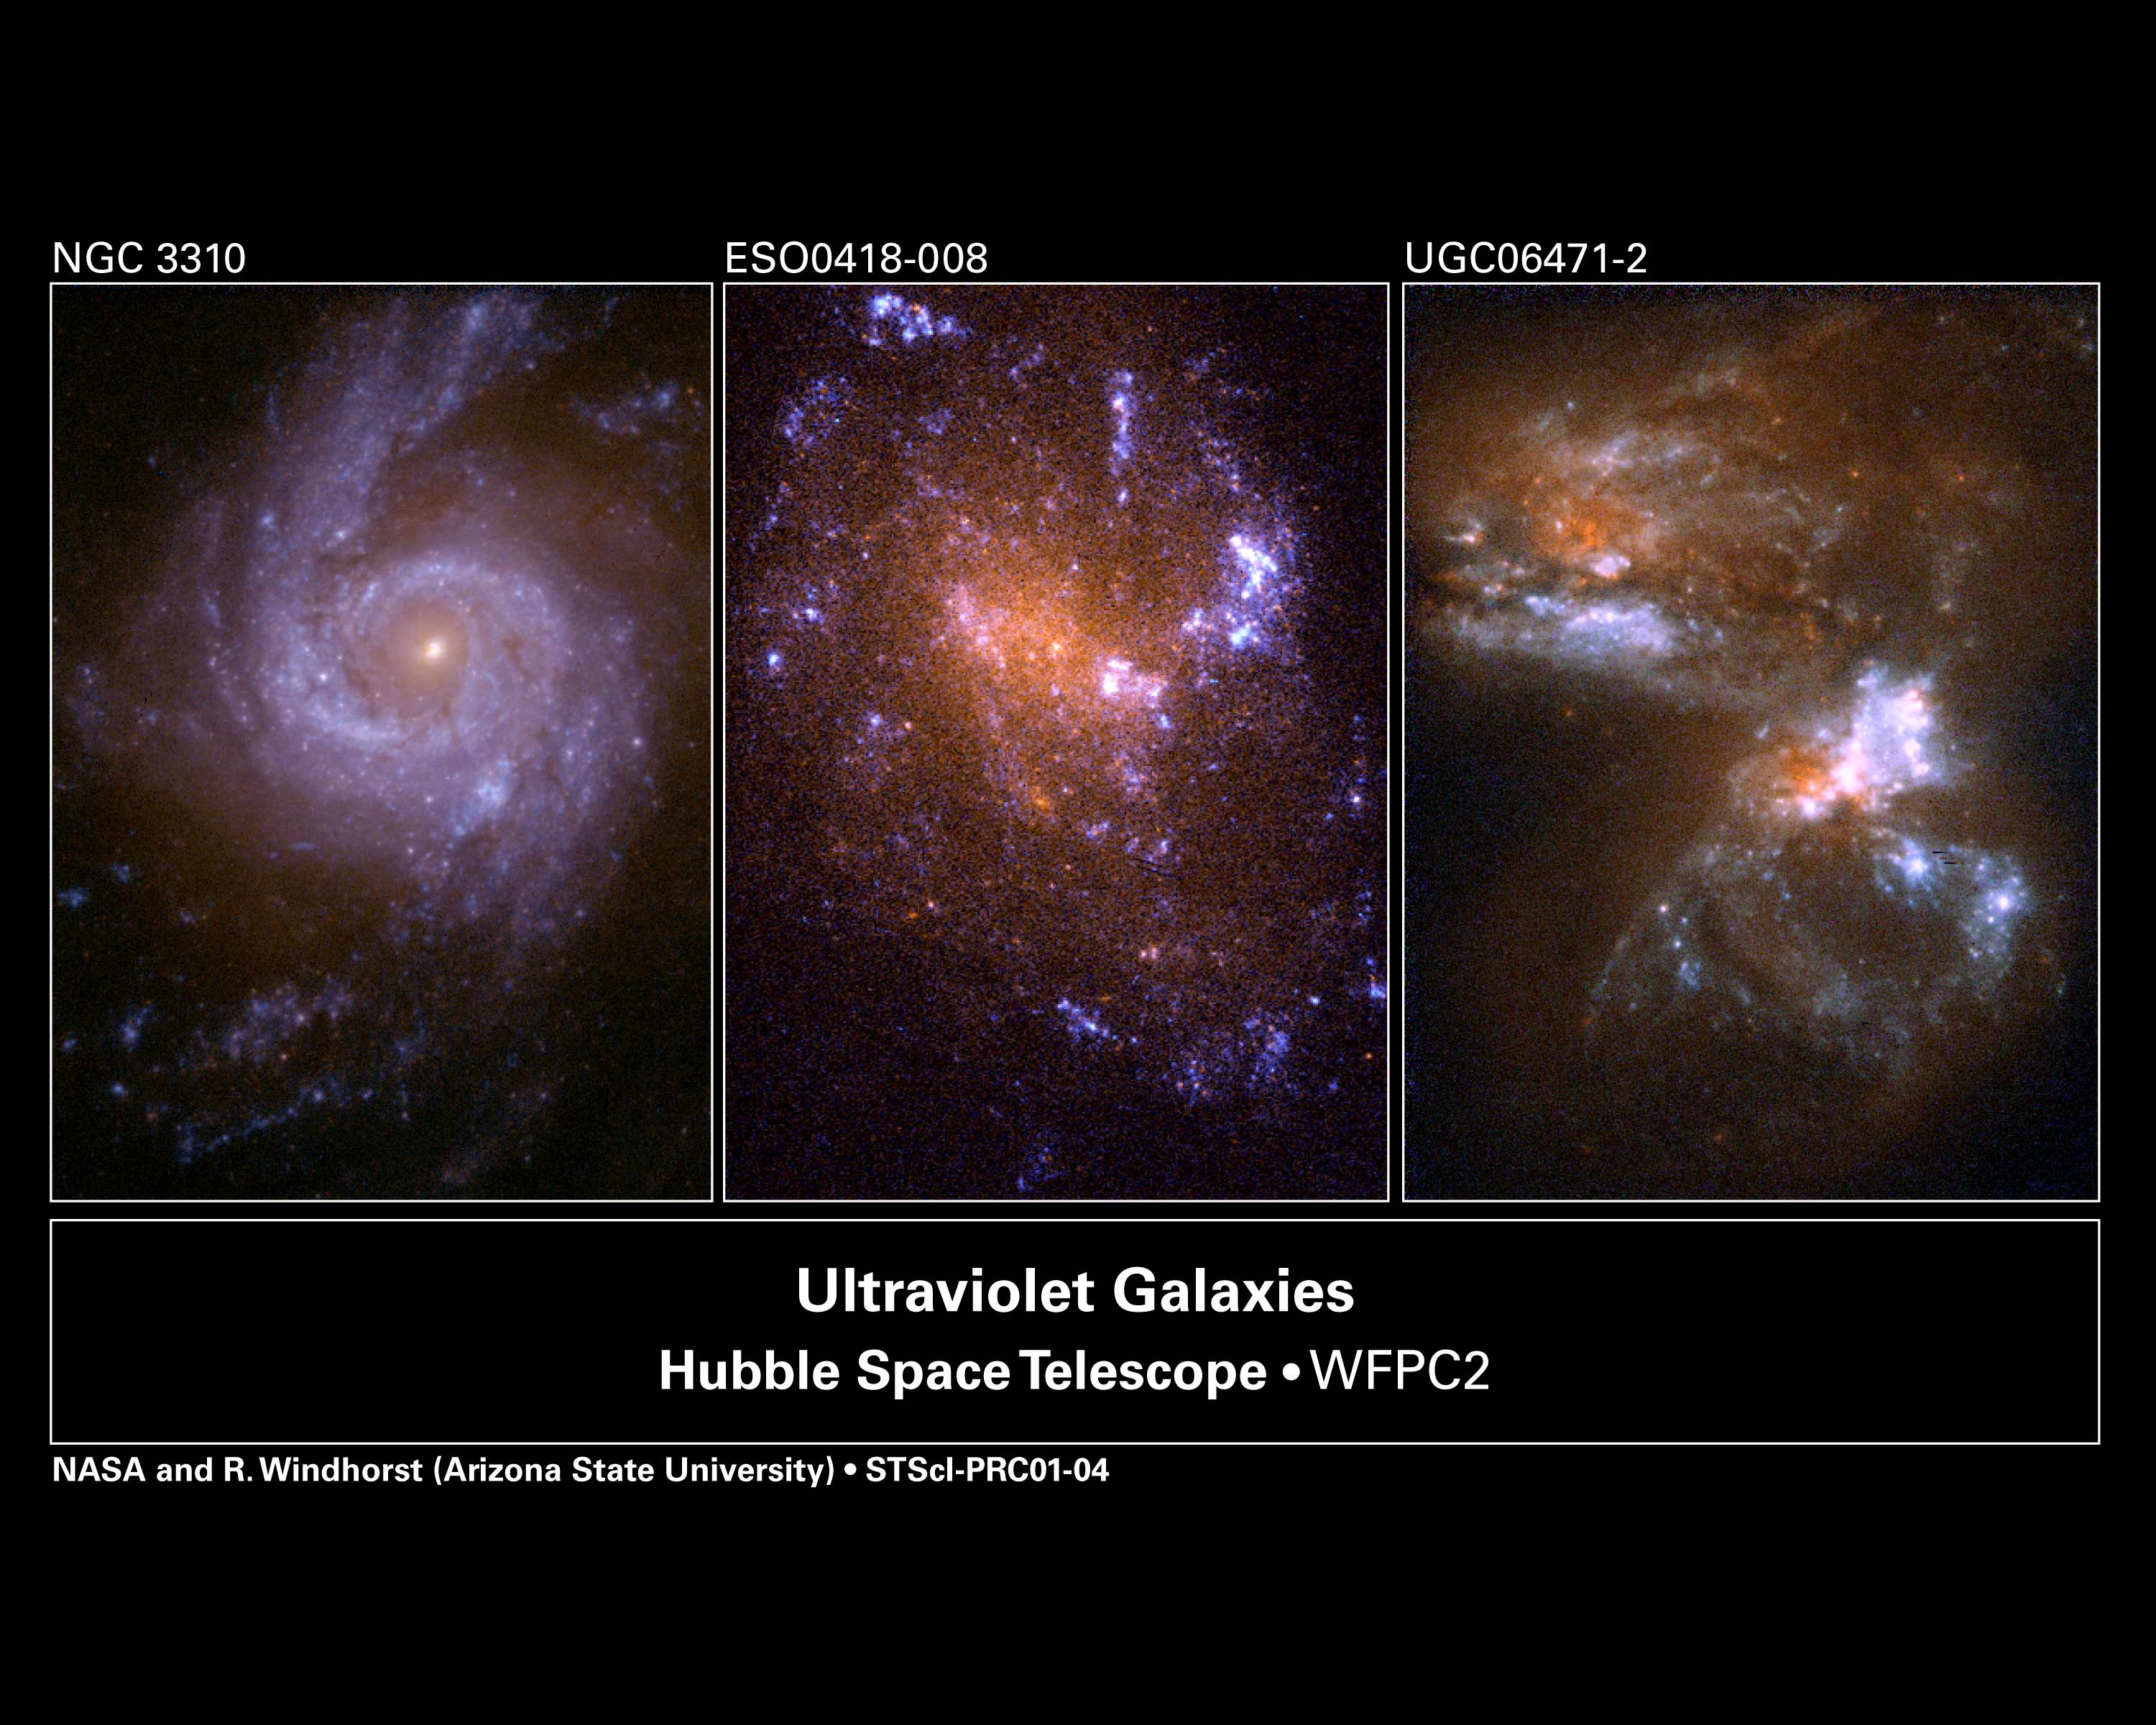

Hubble ultraviolet view of nearby galaxies

Astronomers are using these three Hubble telescope images of nearby galaxies to help tackle the question of why their distant relatives have such odd shapes, appearing markedly different from the typical 'ellipticals' and 'spirals' seen in the nearby universe. By viewing these galaxies in ultraviolet light, astronomers can compare their shapes with those of their distant relatives. The results of their survey support the idea that astronomers are detecting the 'tip of the iceberg' of very distant galaxies. Based on these Hubble ultraviolet images, not all the faraway galaxies necessarily possess intrinsically odd shapes.

Credit: Rogier Windhorst (Arizona State University, Tempe, AZ), the Hubble mid-UV team and NASA/ESA